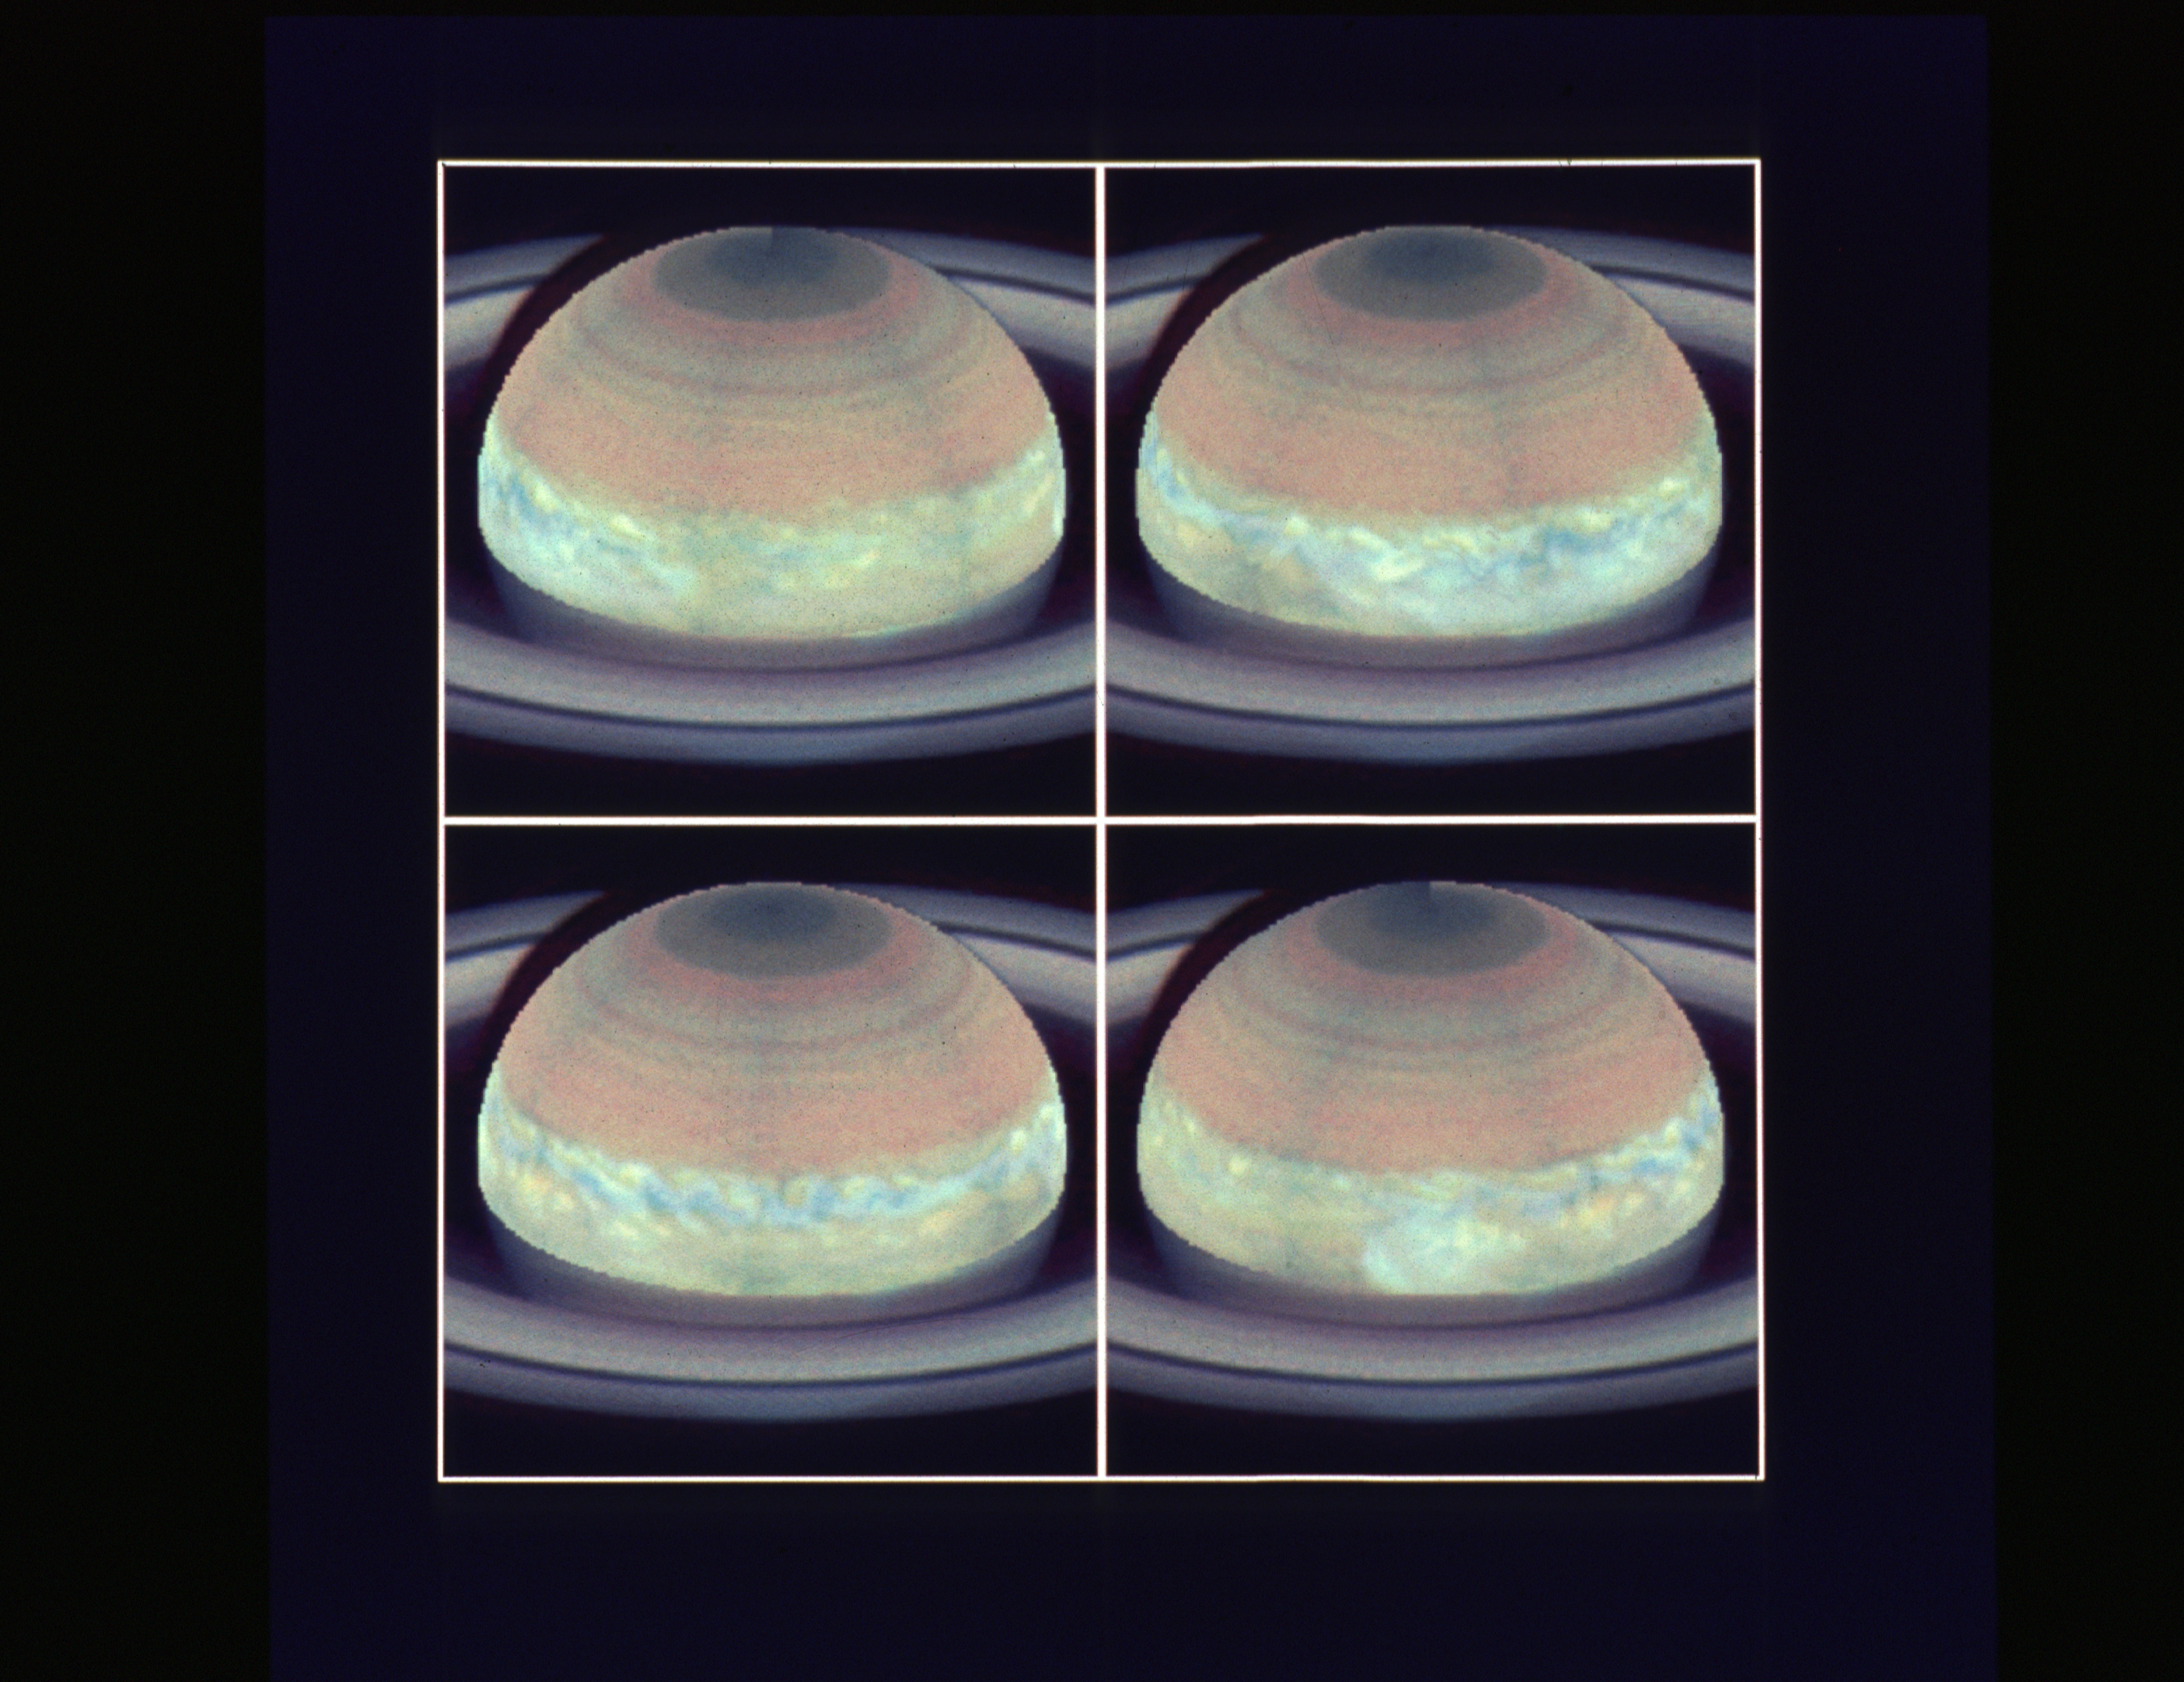

Major storm on Saturn

The accompanying movie shows the Saturn white spot, a great storm in the equatorial region of Saturn, taken with the Hubble Space Telescope Wide Field/Planetary Camera in November 1990. The white spot was discovered by amateur astronomers in September, 1990. Such storms are rare: the last one in the equatorial region occurred in 1933. The movie contains one complete rotation of Saturn. The storm extends completely around the planet, in some places it appears as great masses of clouds and in others as well organized turbulence.

Credit: NASA and ESA